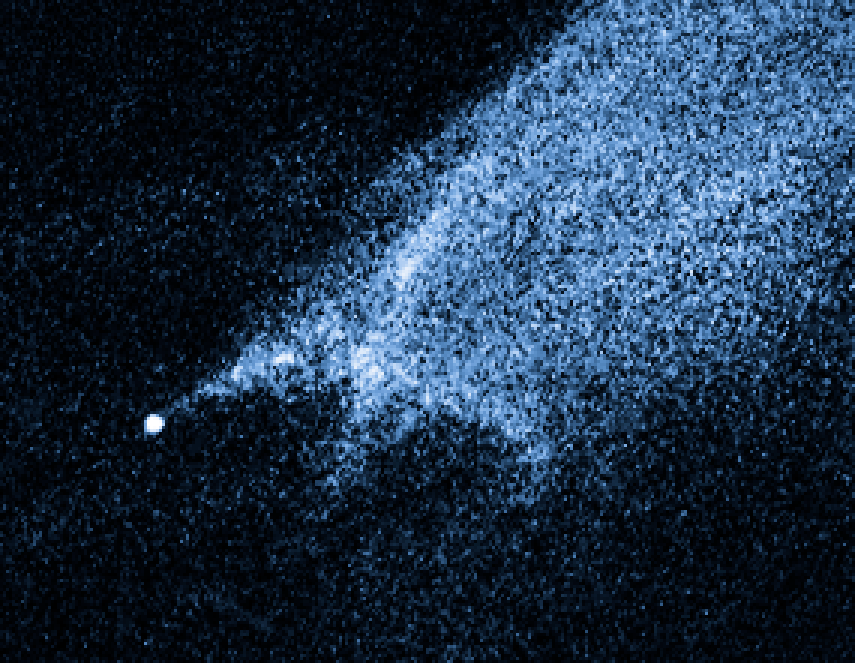

Close-up of comet-like asteroid P/2010 A2

Close-up of comet-like asteroid P/2010 A2.

Credit: NASA, ESA and D. Jewitt (UCLA)